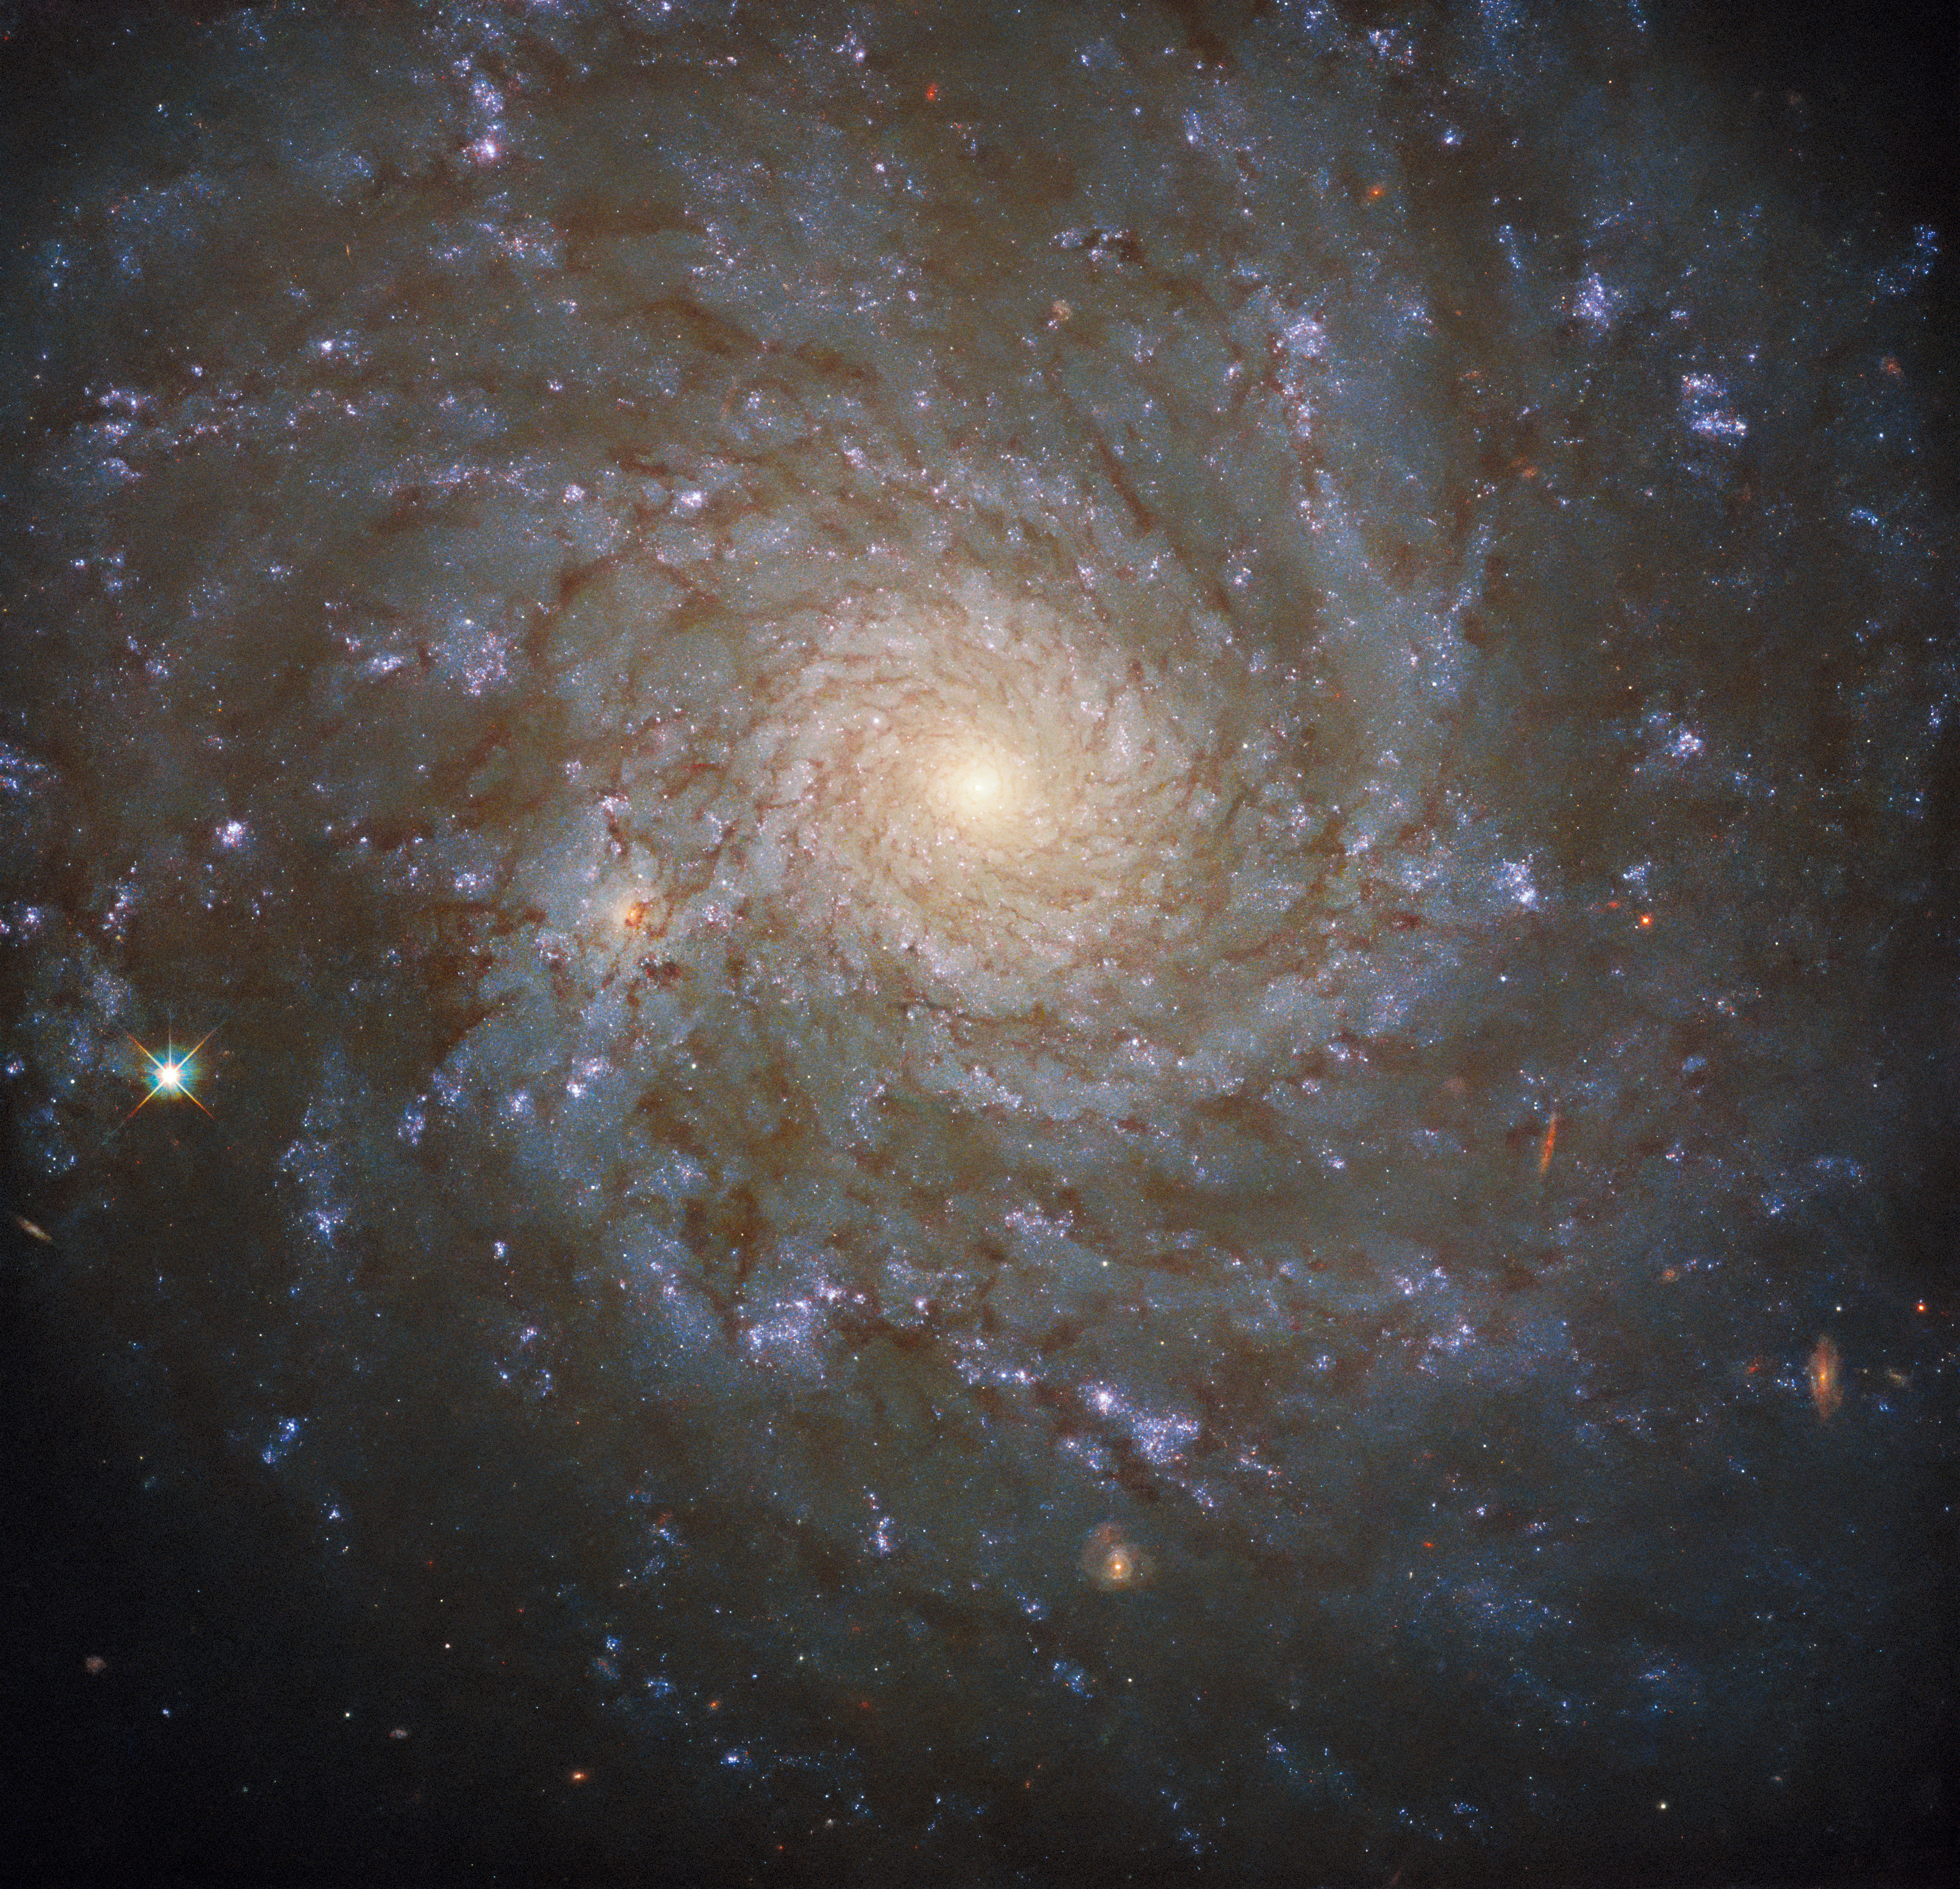

Hubble Spies a Stunning Spiral

This cosmic portrait — captured with the NASA/ESA Hubble Space Telescope’s Wide Field Camera 3 — shows a stunning view of the spiral galaxy NGC 4571, which lies approximately 60 million light-years from Earth in the constellation Coma Berenices. This constellation — whose name translates as Bernice’s Hair — was named after an Egyptian queen who lived more than 2200 years ago.

As majestic as spiral galaxies like NGC 4571 are, they are far from the largest structures known to astronomers. NGC 4571 is part of the Virgo cluster, which contains more than a thousand galaxies. This cluster is in turn part of the larger Virgo supercluster, which also encompasses the Local Group which contains our own galaxy, the Milky Way. Even larger than superclusters are galaxy filaments — the largest known structures in the Universe.

This image comes from a large programme of observations designed to produce a treasure trove of combined observations from two great observatories: Hubble and ALMA. ALMA, The Atacama Large Millimeter/submillimeter Array, is a vast telescope consisting of 66 high-precision antennas high in the Chilean Andes, which together observe at wavelengths between infrared and radio waves. This allows ALMA to detect the clouds of cool interstellar dust which give rise to new stars. Hubble’s razor-sharp observations at ultraviolet wavelengths, meanwhile, allows astronomers to pinpoint the location of hot, luminous, newly formed stars. Together, the ALMA and Hubble observations provide a vital repository of data to astronomers studying star formation, as well as laying the groundwork for future science with the NASA/ESA/CSA James Webb Space Telescope.

Credit: ESA/Hubble & NASA, J. Lee and the PHANGS-HST Team